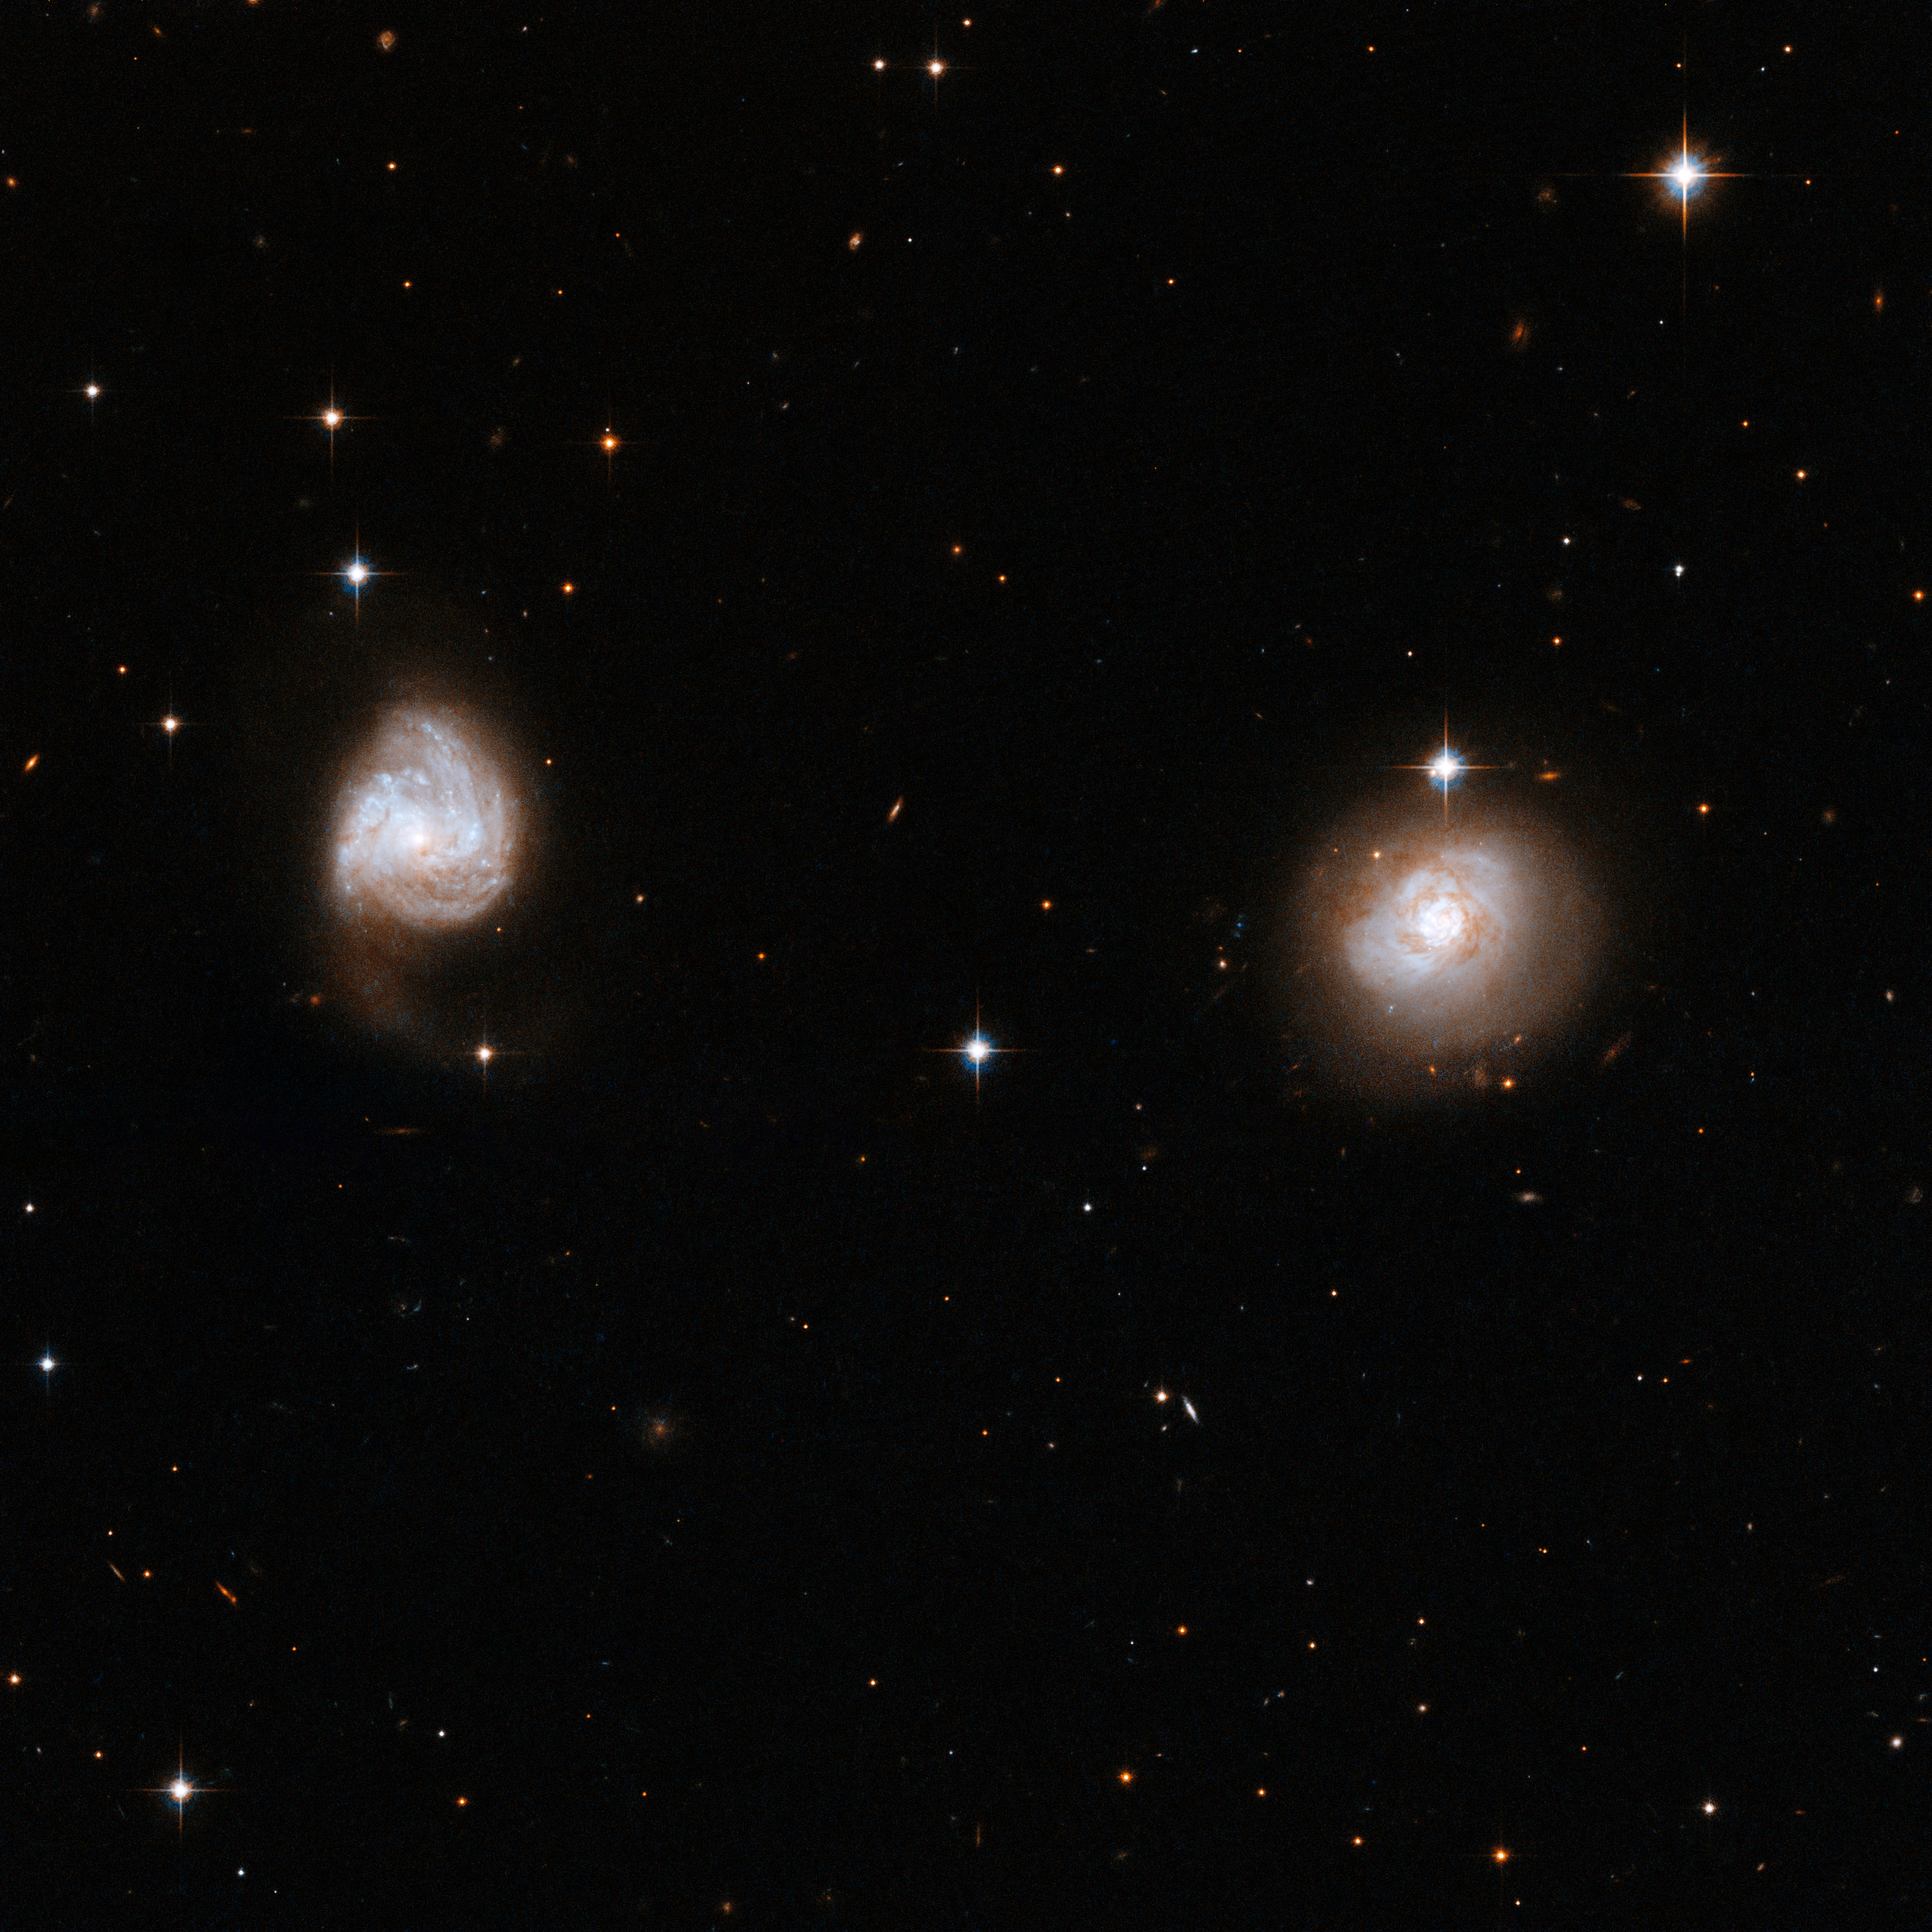

AM 0702-601

AM0702 consists of a couple of detached galaxies, far apart and probably only just beginning to interact. The first signs of the interaction are visible in the galaxy on the left, where the outer structure of the spiral arms is starting to expand, extending a tidal tail of matter out into space.

This image is part of a large collection of 59 images of merging galaxies taken by the Hubble Space Telescope and released on the occasion of its 18th anniversary on 24th April 2008.

Credit: NASA, ESA, the Hubble Heritage Team (STScI/AURA)-ESA/Hubble Collaboration and A. Evans (University of Virginia, Charlottesville/NRAO/Stony Brook University)